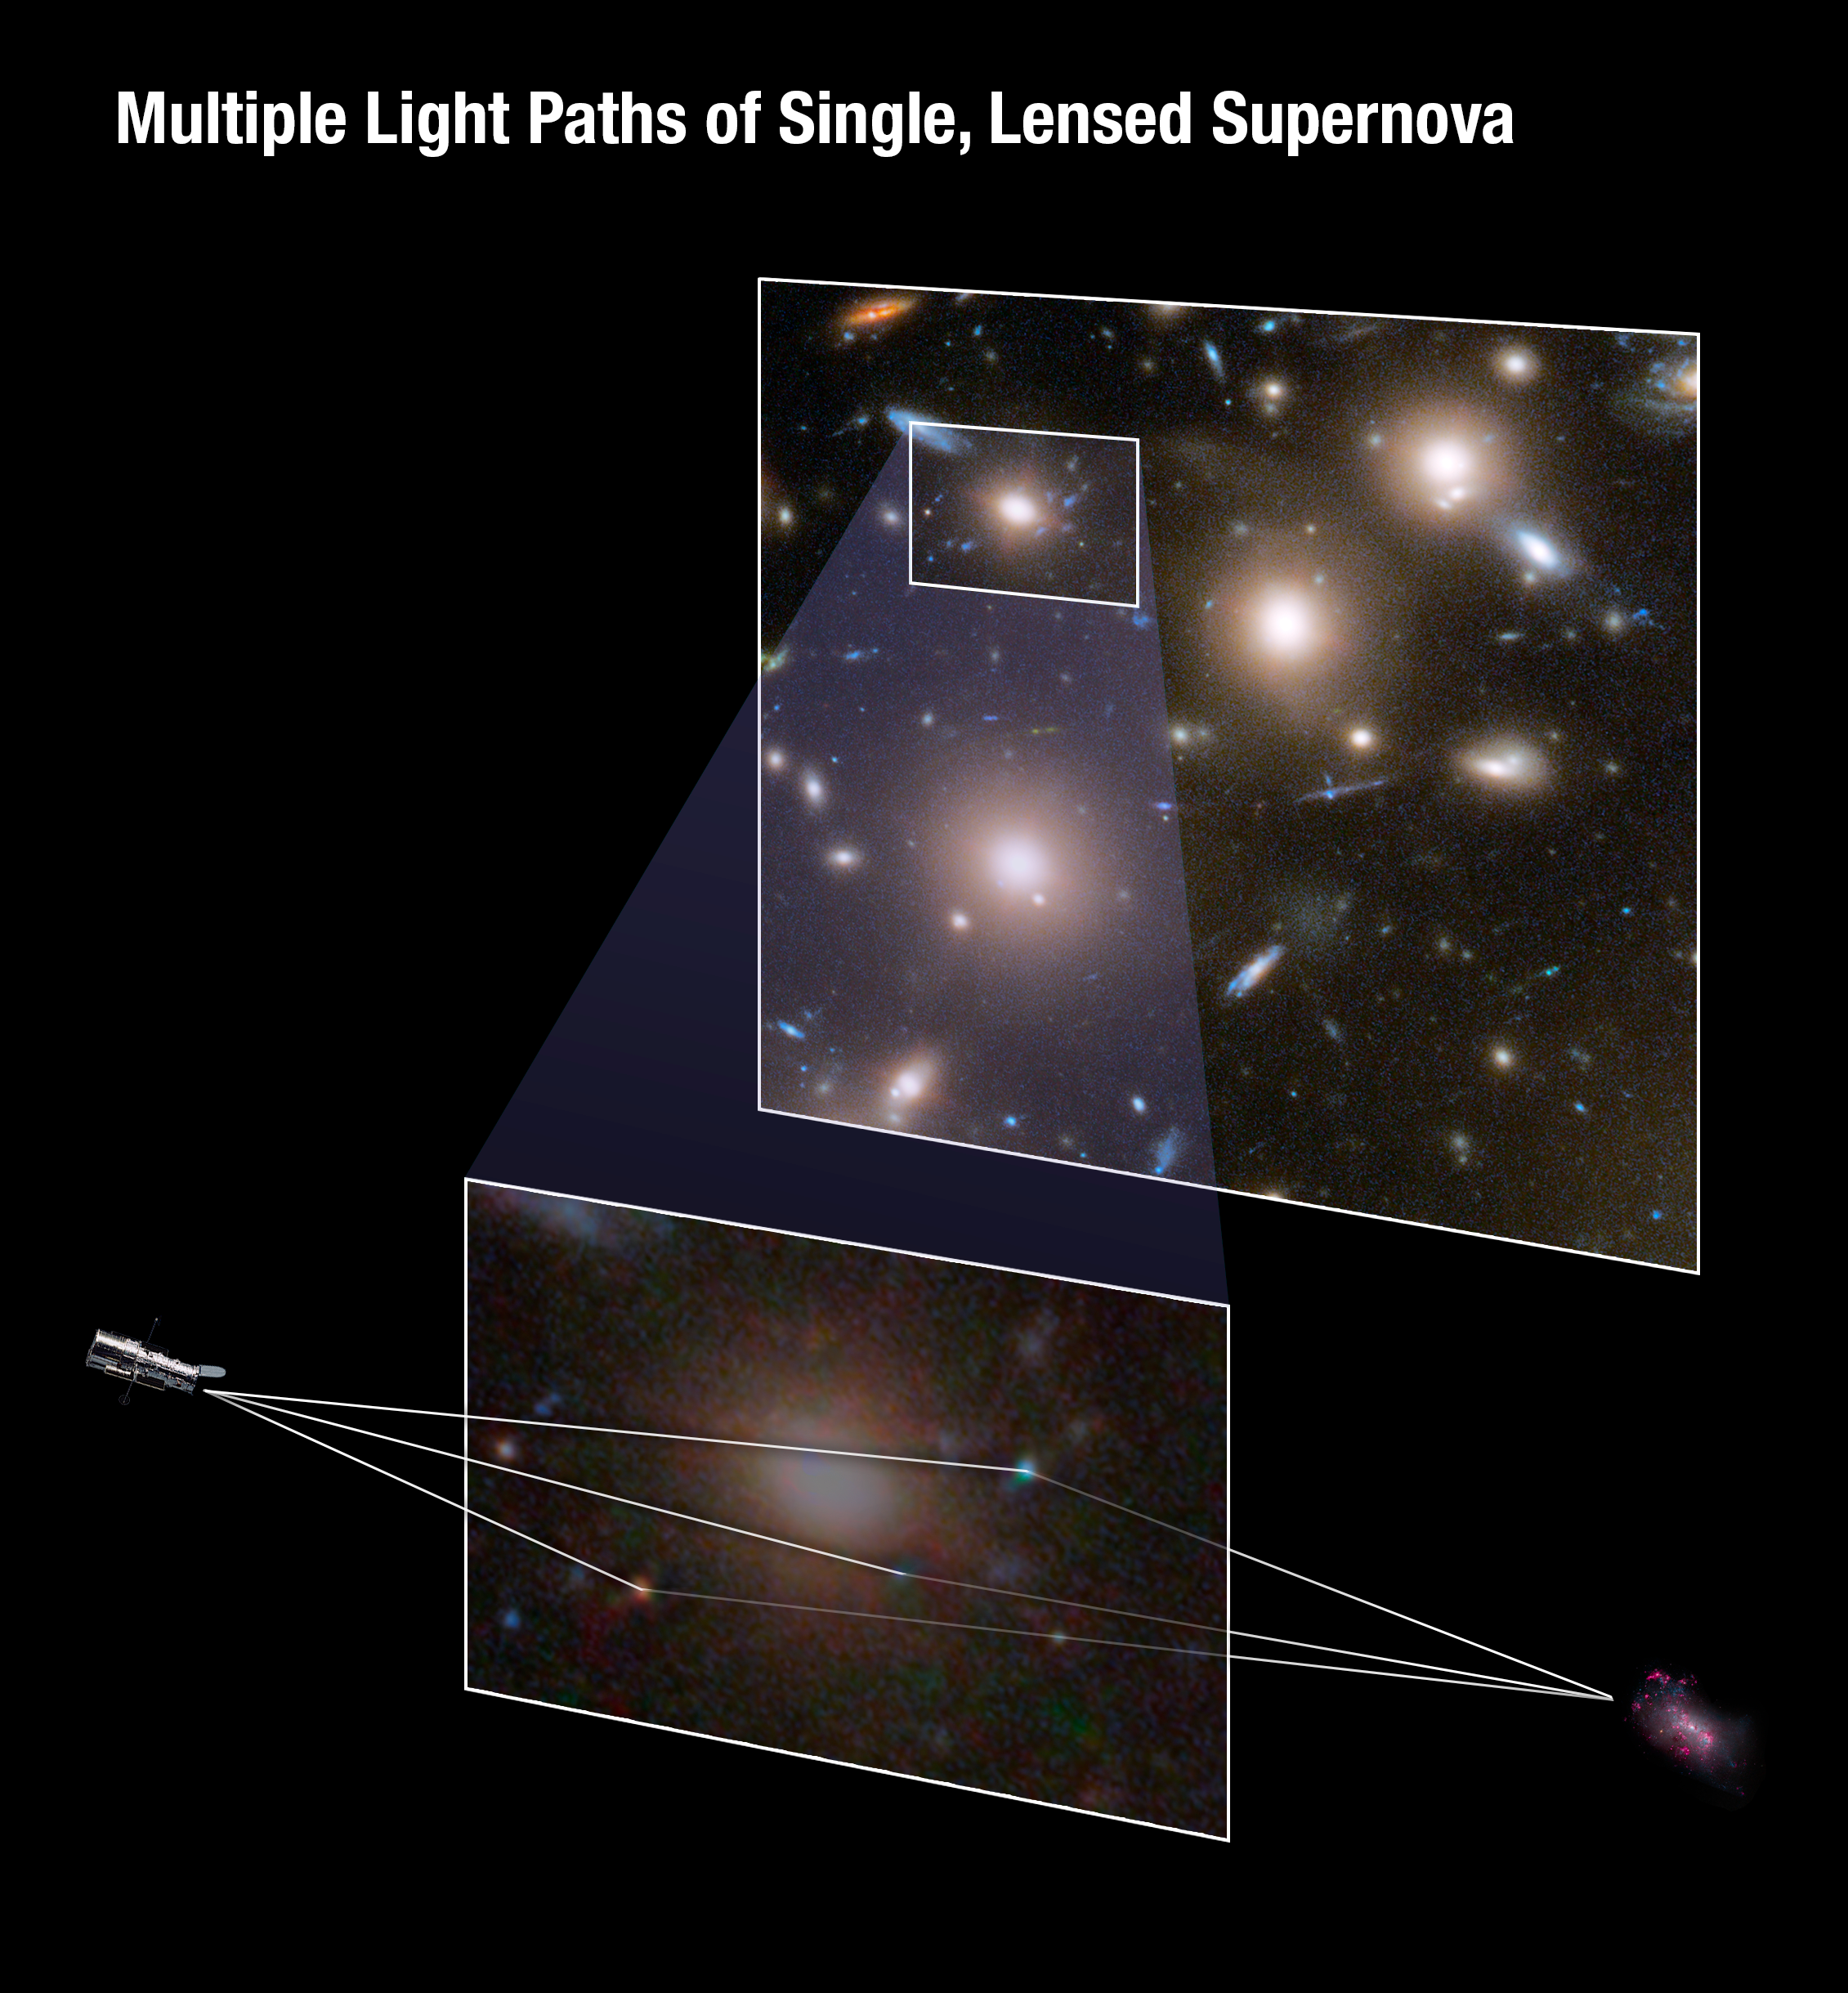

Multiple Light Paths of Single, Lensed Supernova

Through the phenomenon of gravitational lensing, the NASA/ESA Hubble Space Telescope captured three different moments in the explosion of a very far-off supernova—all in one picture! In this case, the immense gravity of the galaxy cluster Abell 370 acted as a cosmic lens, bending and magnifying the light from the more distant supernova located behind the cluster. The warping also produced multiple images of the explosion over different time periods that all arrived at Hubble simultaneously.

The top box shows a portion of Abell 370. The box-within-the-box marks the area where the distant supernova was multiply lensed. The bottom image is a magnified version of this area with the light paths marked for the three images of the supernova. The right side of the bottom image shows the distant galaxy in which the supernova exploded. The lines show how the light travelled through the gravitational lens, with some of the light taking longer routes across "valleys" of warped space. The warping produced three images of the explosion over different time periods that all arrived at Hubble simultaneously.

Credit: NASA, ESA, A. Pagan (STScI)